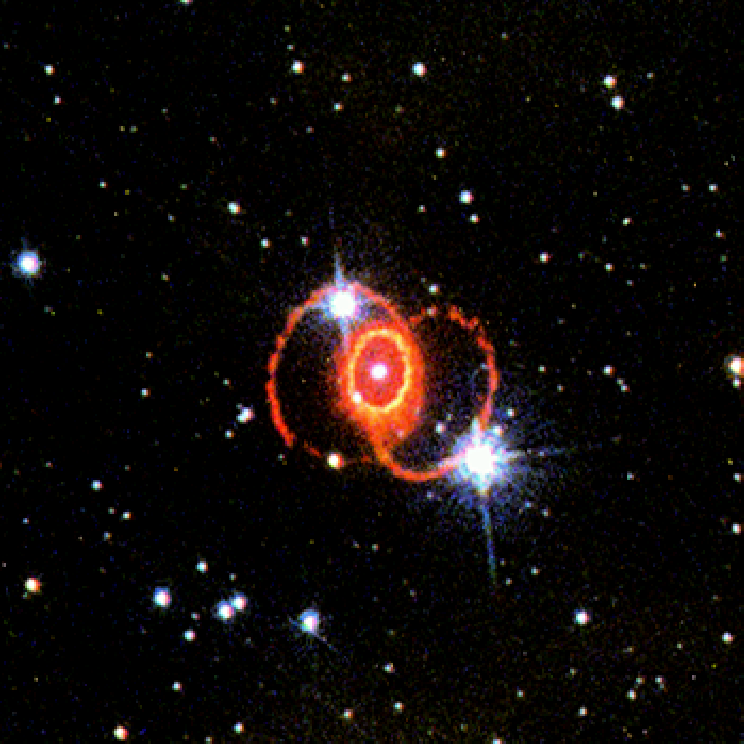

STIS Chemically Analyzes the Ring Around SN 1987a

The ring formed 30, 000 years before the star exploded and so is a fossil record of the final stages of the star's existence. The light from the supernova heated the gas in the ring so that it now glows at temperatures from 5, 000 to 25, 000 degrees Kelvin.

Credit: Jason Pun (NOAO) and SINS Collaboration